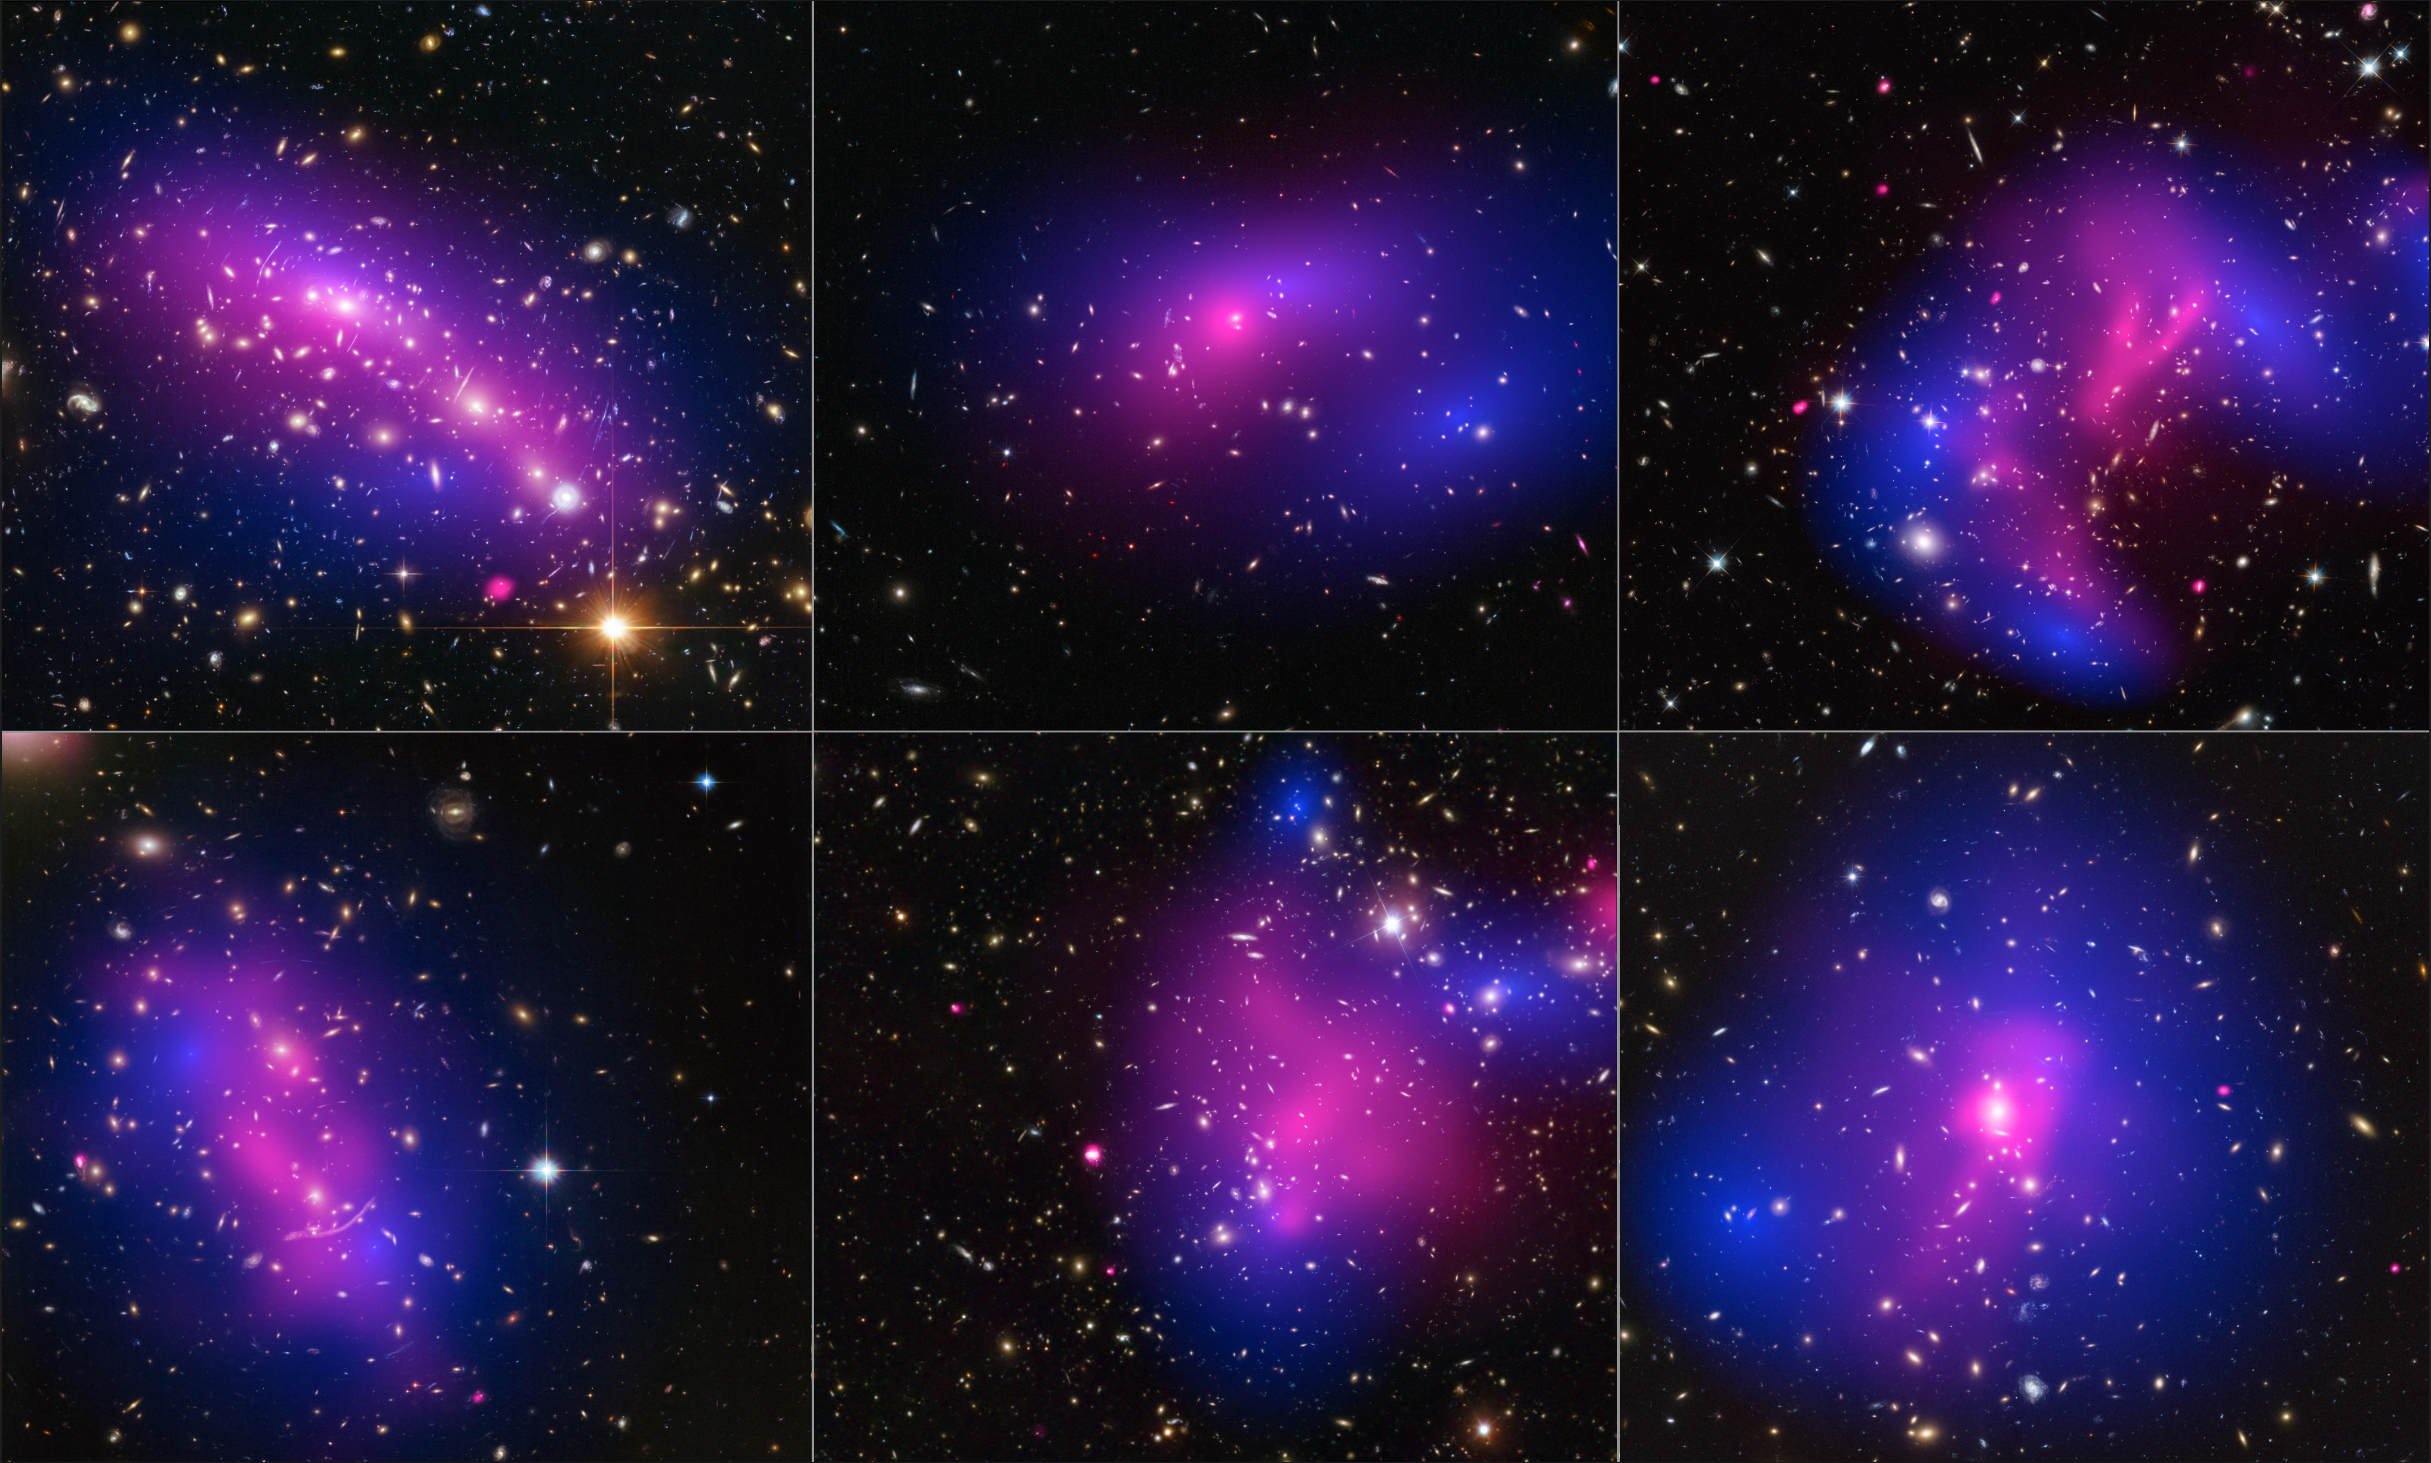

Collage of six cluster collisions, with dark-matter maps and x-ray data

This collage shows images of six different galaxy clusters taken with the NASA/ESA Hubble Space Telescope and NASA's Chandra X-ray Observatory. The clusters were observed in a study of how dark matter in clusters of galaxies behaves when the clusters collide. Seventy-two large cluster collisions were studied in total.

Using visible-light images from Hubble, the team was able to map the post-collision distribution of stars and also of the dark matter(coloured in blue), which was traced through its gravitational lensing effects on background light. Chandra was used to see the X-ray emission from impacted gas (pink).

The team determined that dark matter interacts with itself and everything else even less than previously thought.

The clusters shown here are, from left to right and top to bottom: MACS J0416.1-2403, MACS J0152.5-2852, MACS J0717.5+3745, Abell 370, Abell 2744, and ZwCl 1358+62.

Credit: NASA/ESA/STScI/CXC, D. Harvey (Ecole Polytechnique Federale de Lausanne, Switzerland; University of Edinburgh, UK), R. Massey (Durham University, UK), T. Kitching (University College London, UK), and A. Taylor and E. Tittley (University of Edinburgh, UK